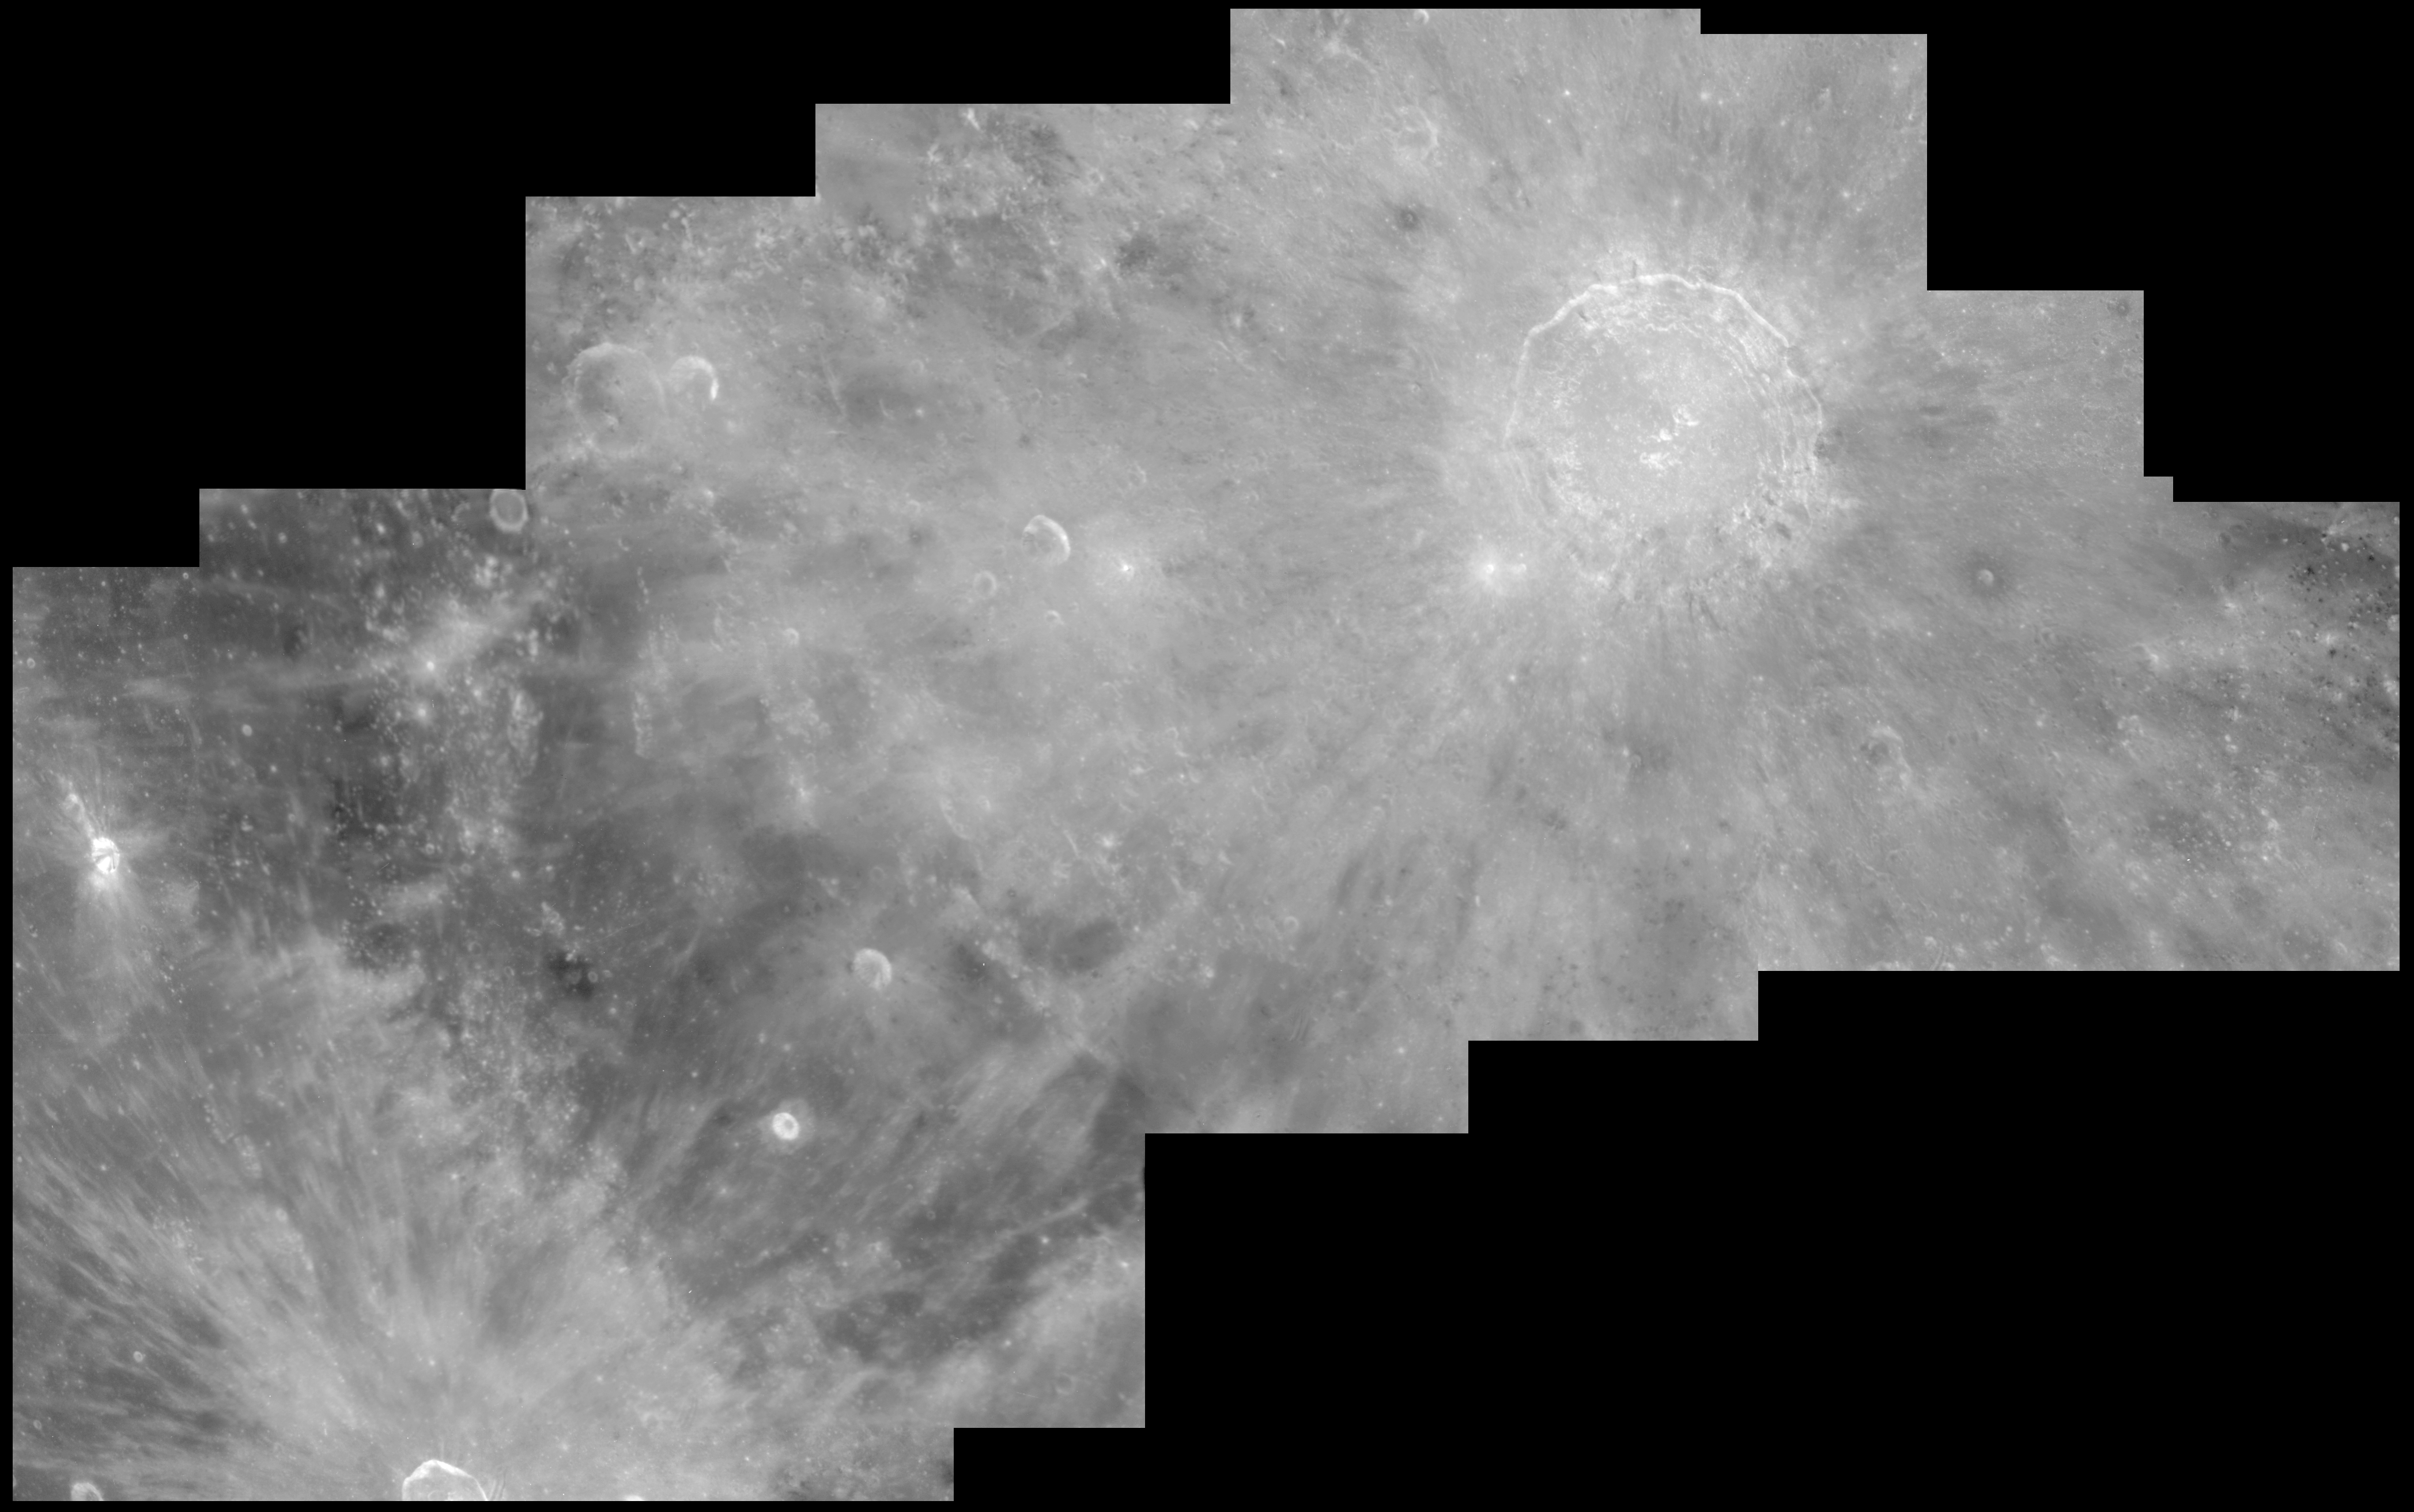

Crater Copernicus on the Moon

Hubble's crisp bird's-eye view clearly shows the ray pattern of bright dust ejected out of the crater over one billion years ago, when an asteroid larger than a mile across slammed into the Moon. Hubble can resolve features as small as 600 feet across in the terraced walls of the crater, and the hummock-like blanket of material blasted out by the meteor impact.

Credit: John Caldwell (York University, Ontario), Alex Storrs (STScI), and NASA/ESA